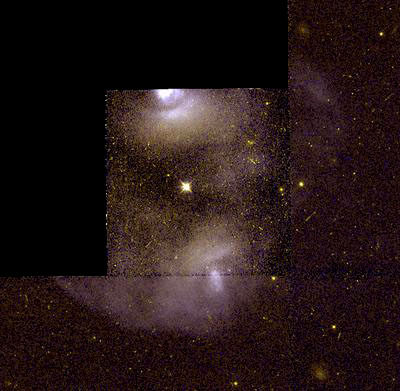

NGC 2371

This image is a part of the Hubble Gallery of Planetary Nebulae.

Credit: Howard Bond (ST ScI) and NASA/ESA